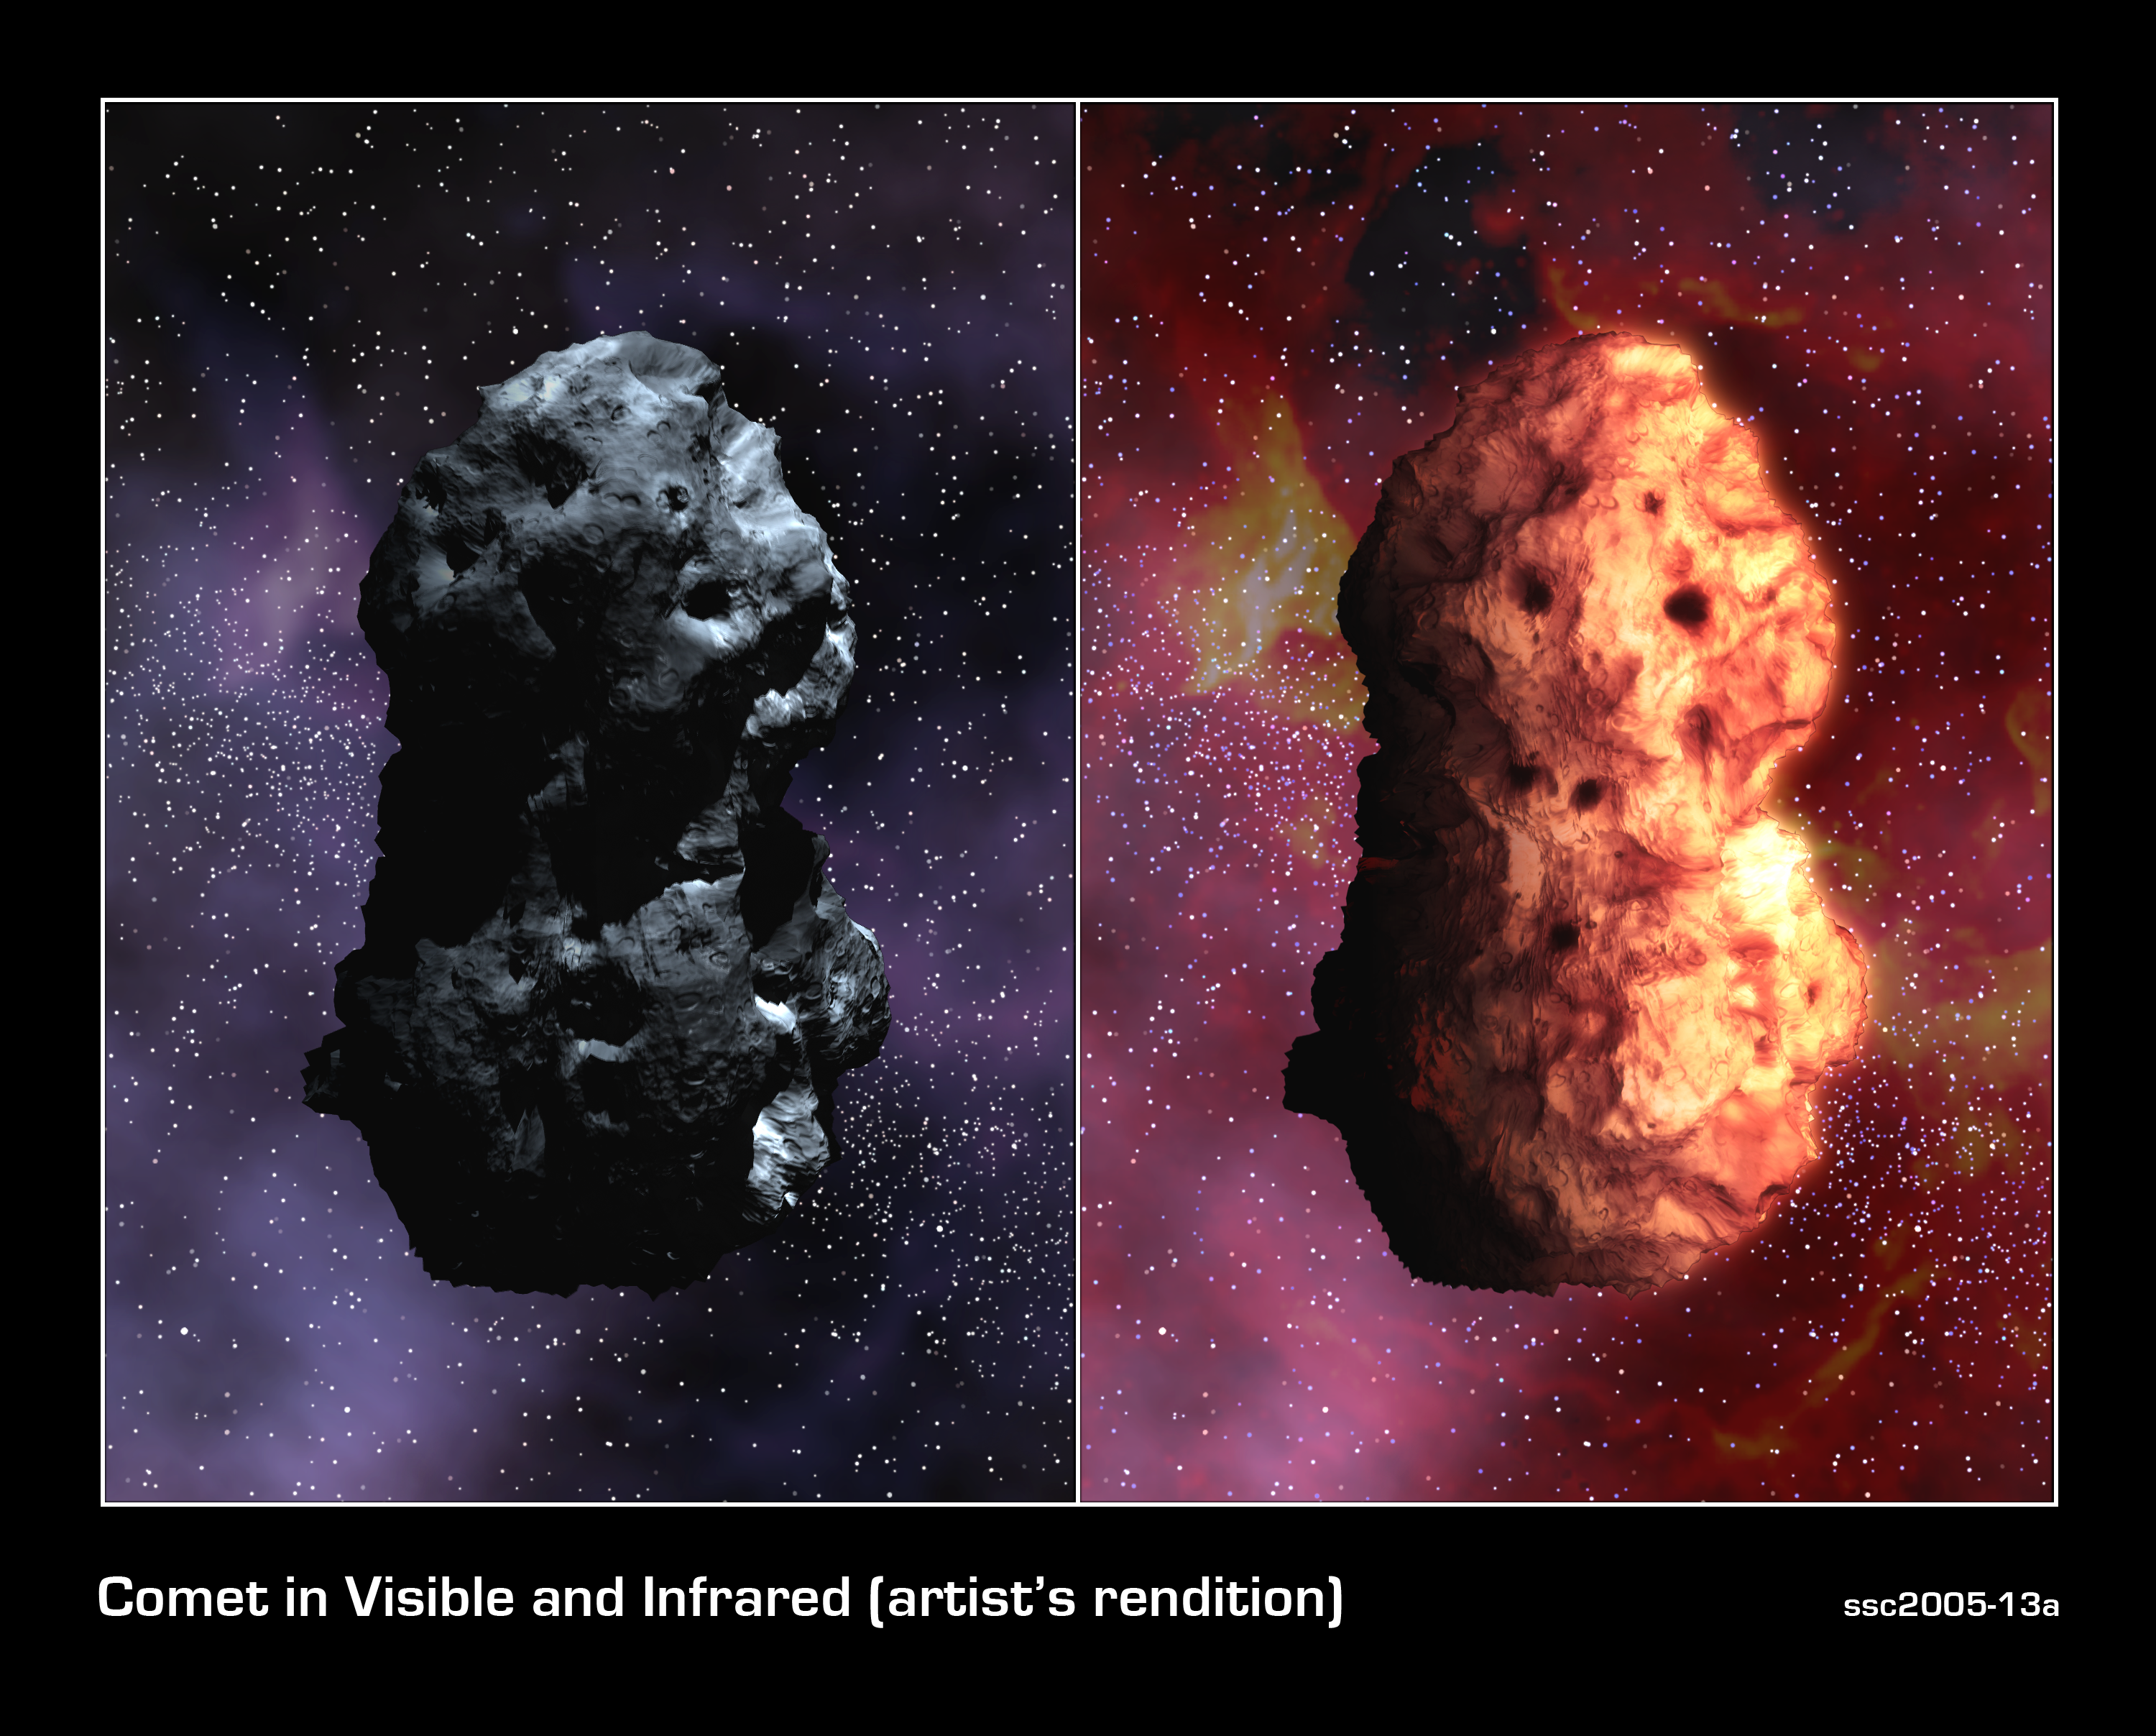

Visible and Infrared Views of Comet Tempel 1 (Artist's Concept)

These artist's concepts of Tempel 1 simulate an optical view of the comet (left), next to the simulated infrared view (right). The images illustrate the comet's shape, reflectivity, rotation rate and surface temperature, based on information from NASA/ESA Hubble Space Telescope and Spitzer Space Telescope.

Measurements from the Great Observatories indicate that the comet is a matte black object roughly 14 by 4 kilometers (8.7 by 2.5 miles), or about one-half the size of Manhattan.

Spitzer detects the comet's infrared energy or heat, depicted by the reddish glow. The sunlit side of the nucleus is glowing warmly, and the nightside is about the temperature of deep space.

Credit: NASA, Jet Propulsion Laboratory-Caltech, and T. Pyle (Spitzer Science Center)